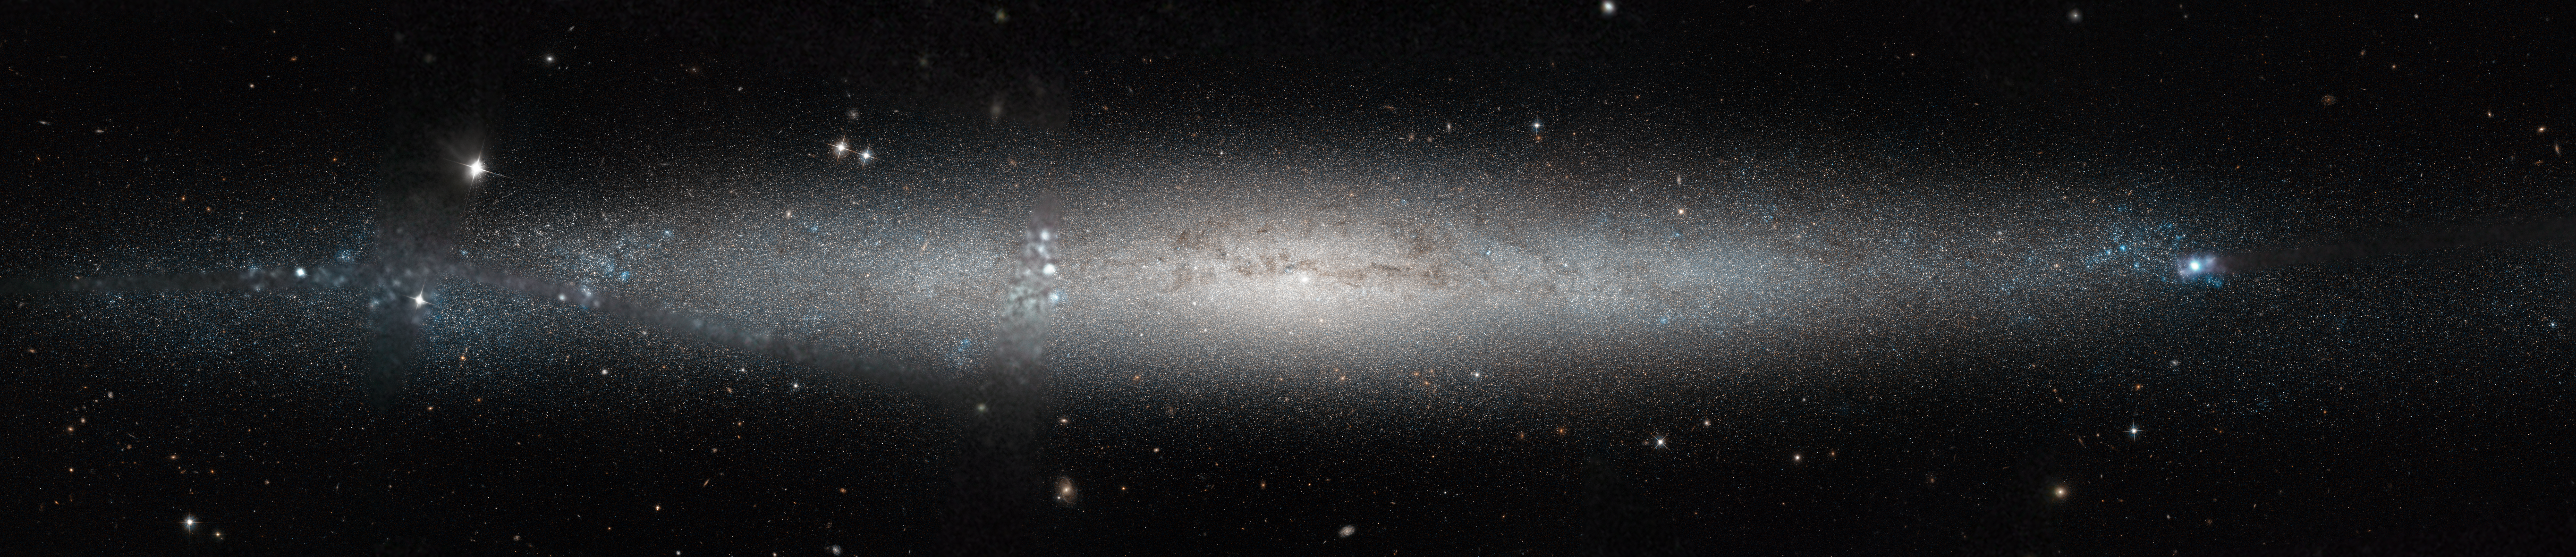

A silver needle in the sky

This stunning new image from the NASA/ESA Hubble Space Telescope shows part of the sky in the constellation of Canes Venatici (The Hunting Dogs).

Although this region of the sky is not home to any stellar heavyweights, being mostly filled with stars of average brightness, it does contain five Messier objects and numerous intriguing galaxies — including NGC 5195, a small barred spiral galaxy considered to be one of the most beautiful galaxies visible, and its nearby interacting partner the Whirlpool Galaxy (heic0506a). The quirky Sunflower Galaxy is another notable galaxy in this constellation, and is one of the largest and brightest edge-on galaxies in our skies.

Joining this host of characters is spiral galaxy NGC 4244, nicknamed the Silver Needle Galaxy, shown here in a new image from Hubble. This galaxy spans some 65 000 light-years and lies around 13.5 million light-years away. It appears as a wafer-thin streak across the sky, with its loosely wound spiral arms hidden from view as we observe the galaxy side on. It is part of a group of galaxies known as the M94 Group [1].

Numerous bright clumps of gas can be seen scattered across its length, along with dark dust lanes surrounding the galaxy’s core. NGC 4244 also has a bright star cluster at its centre. Although we can make out the galaxy’s bright central region and star-spattered arms, we cannot see any more intricate structure due to the galaxy’s position; from Earth, we see it stretched out as a flattened streak across the sky.

A number of different observations were pieced together to form this mosaic, and gaps in Hubble’s coverage have been filled in using ground-based data. The Hubble observations were taken as part of the GHOSTS survey, which is scanning nearby galaxies to explore how they and their stars formed to get a more complete view of the history of the Universe.

Credit: NASA & ESA Acknowledgement: Roelof de Jong